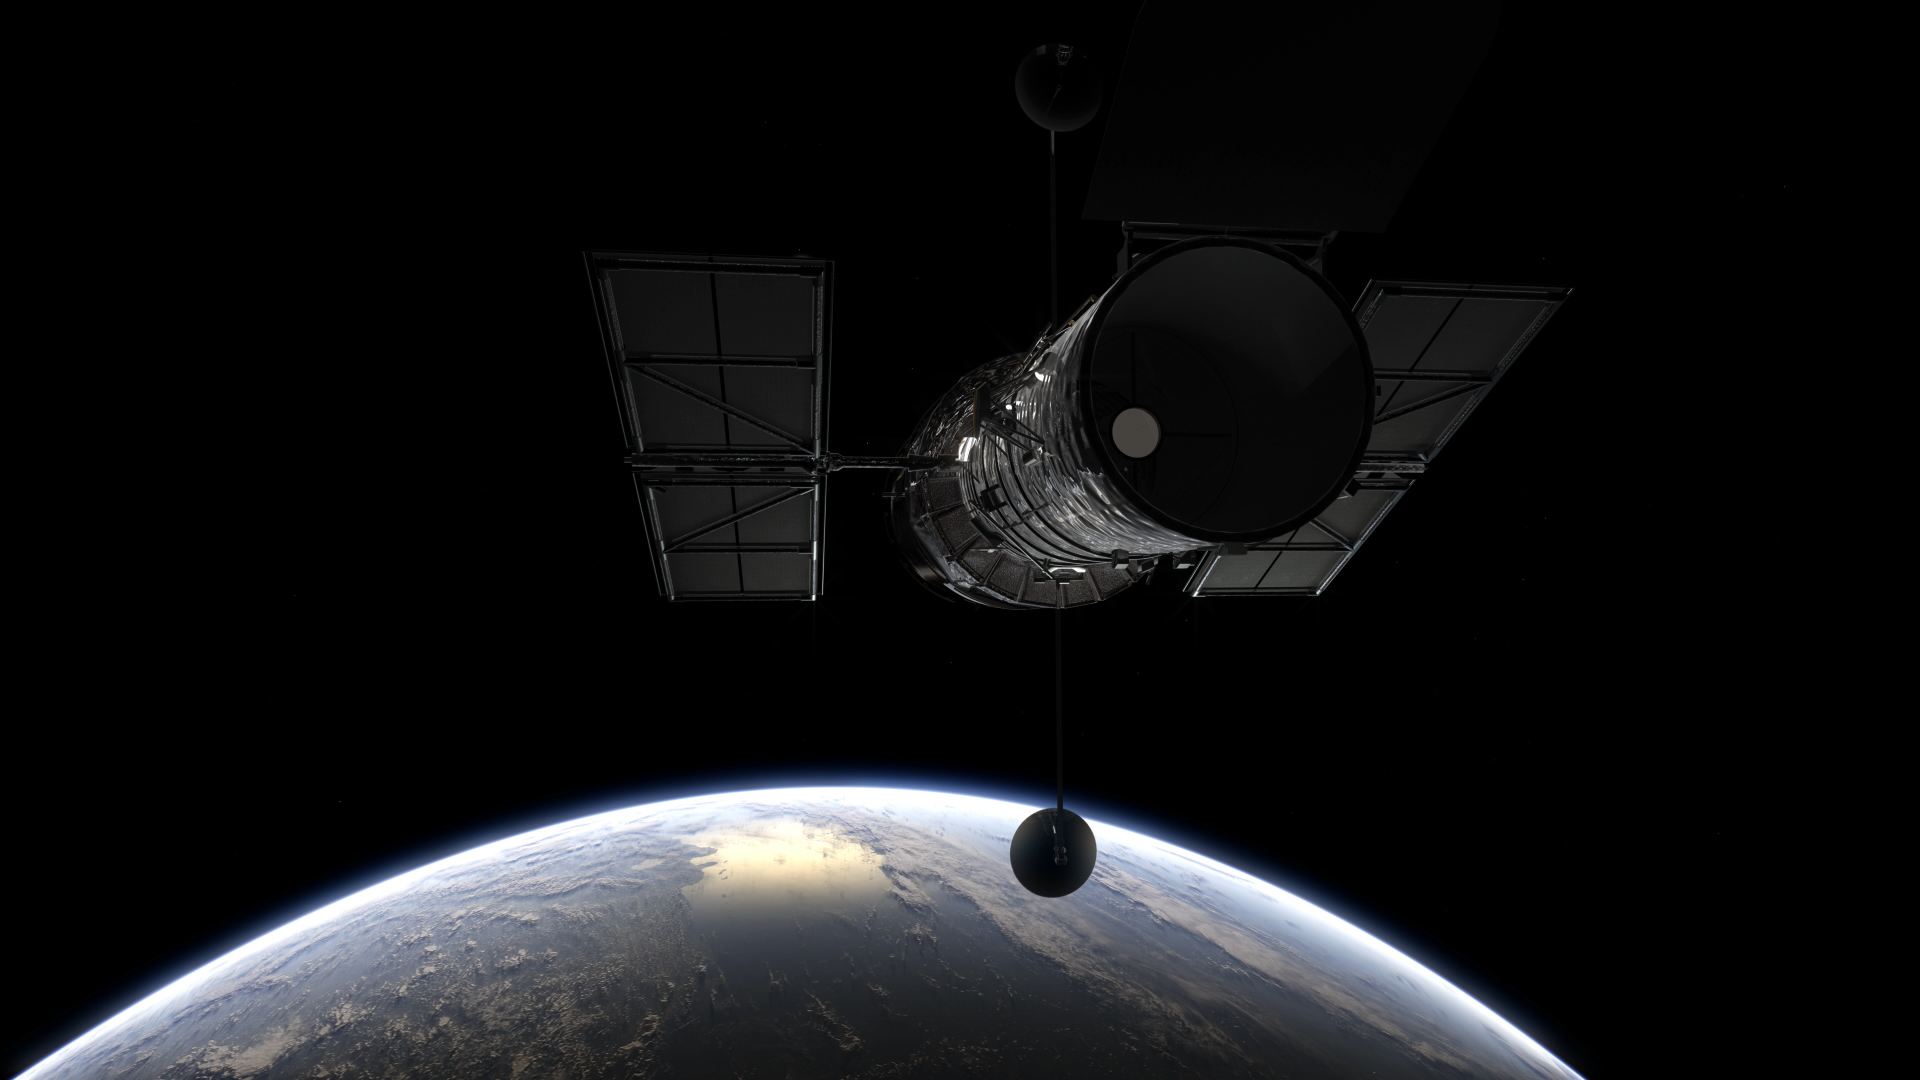

Still from Hubblecast 98: Hubble’s biggest discoveries — part 1

This is a still from Hubblecast 98.

Credit: ESA/Hubble, NASA